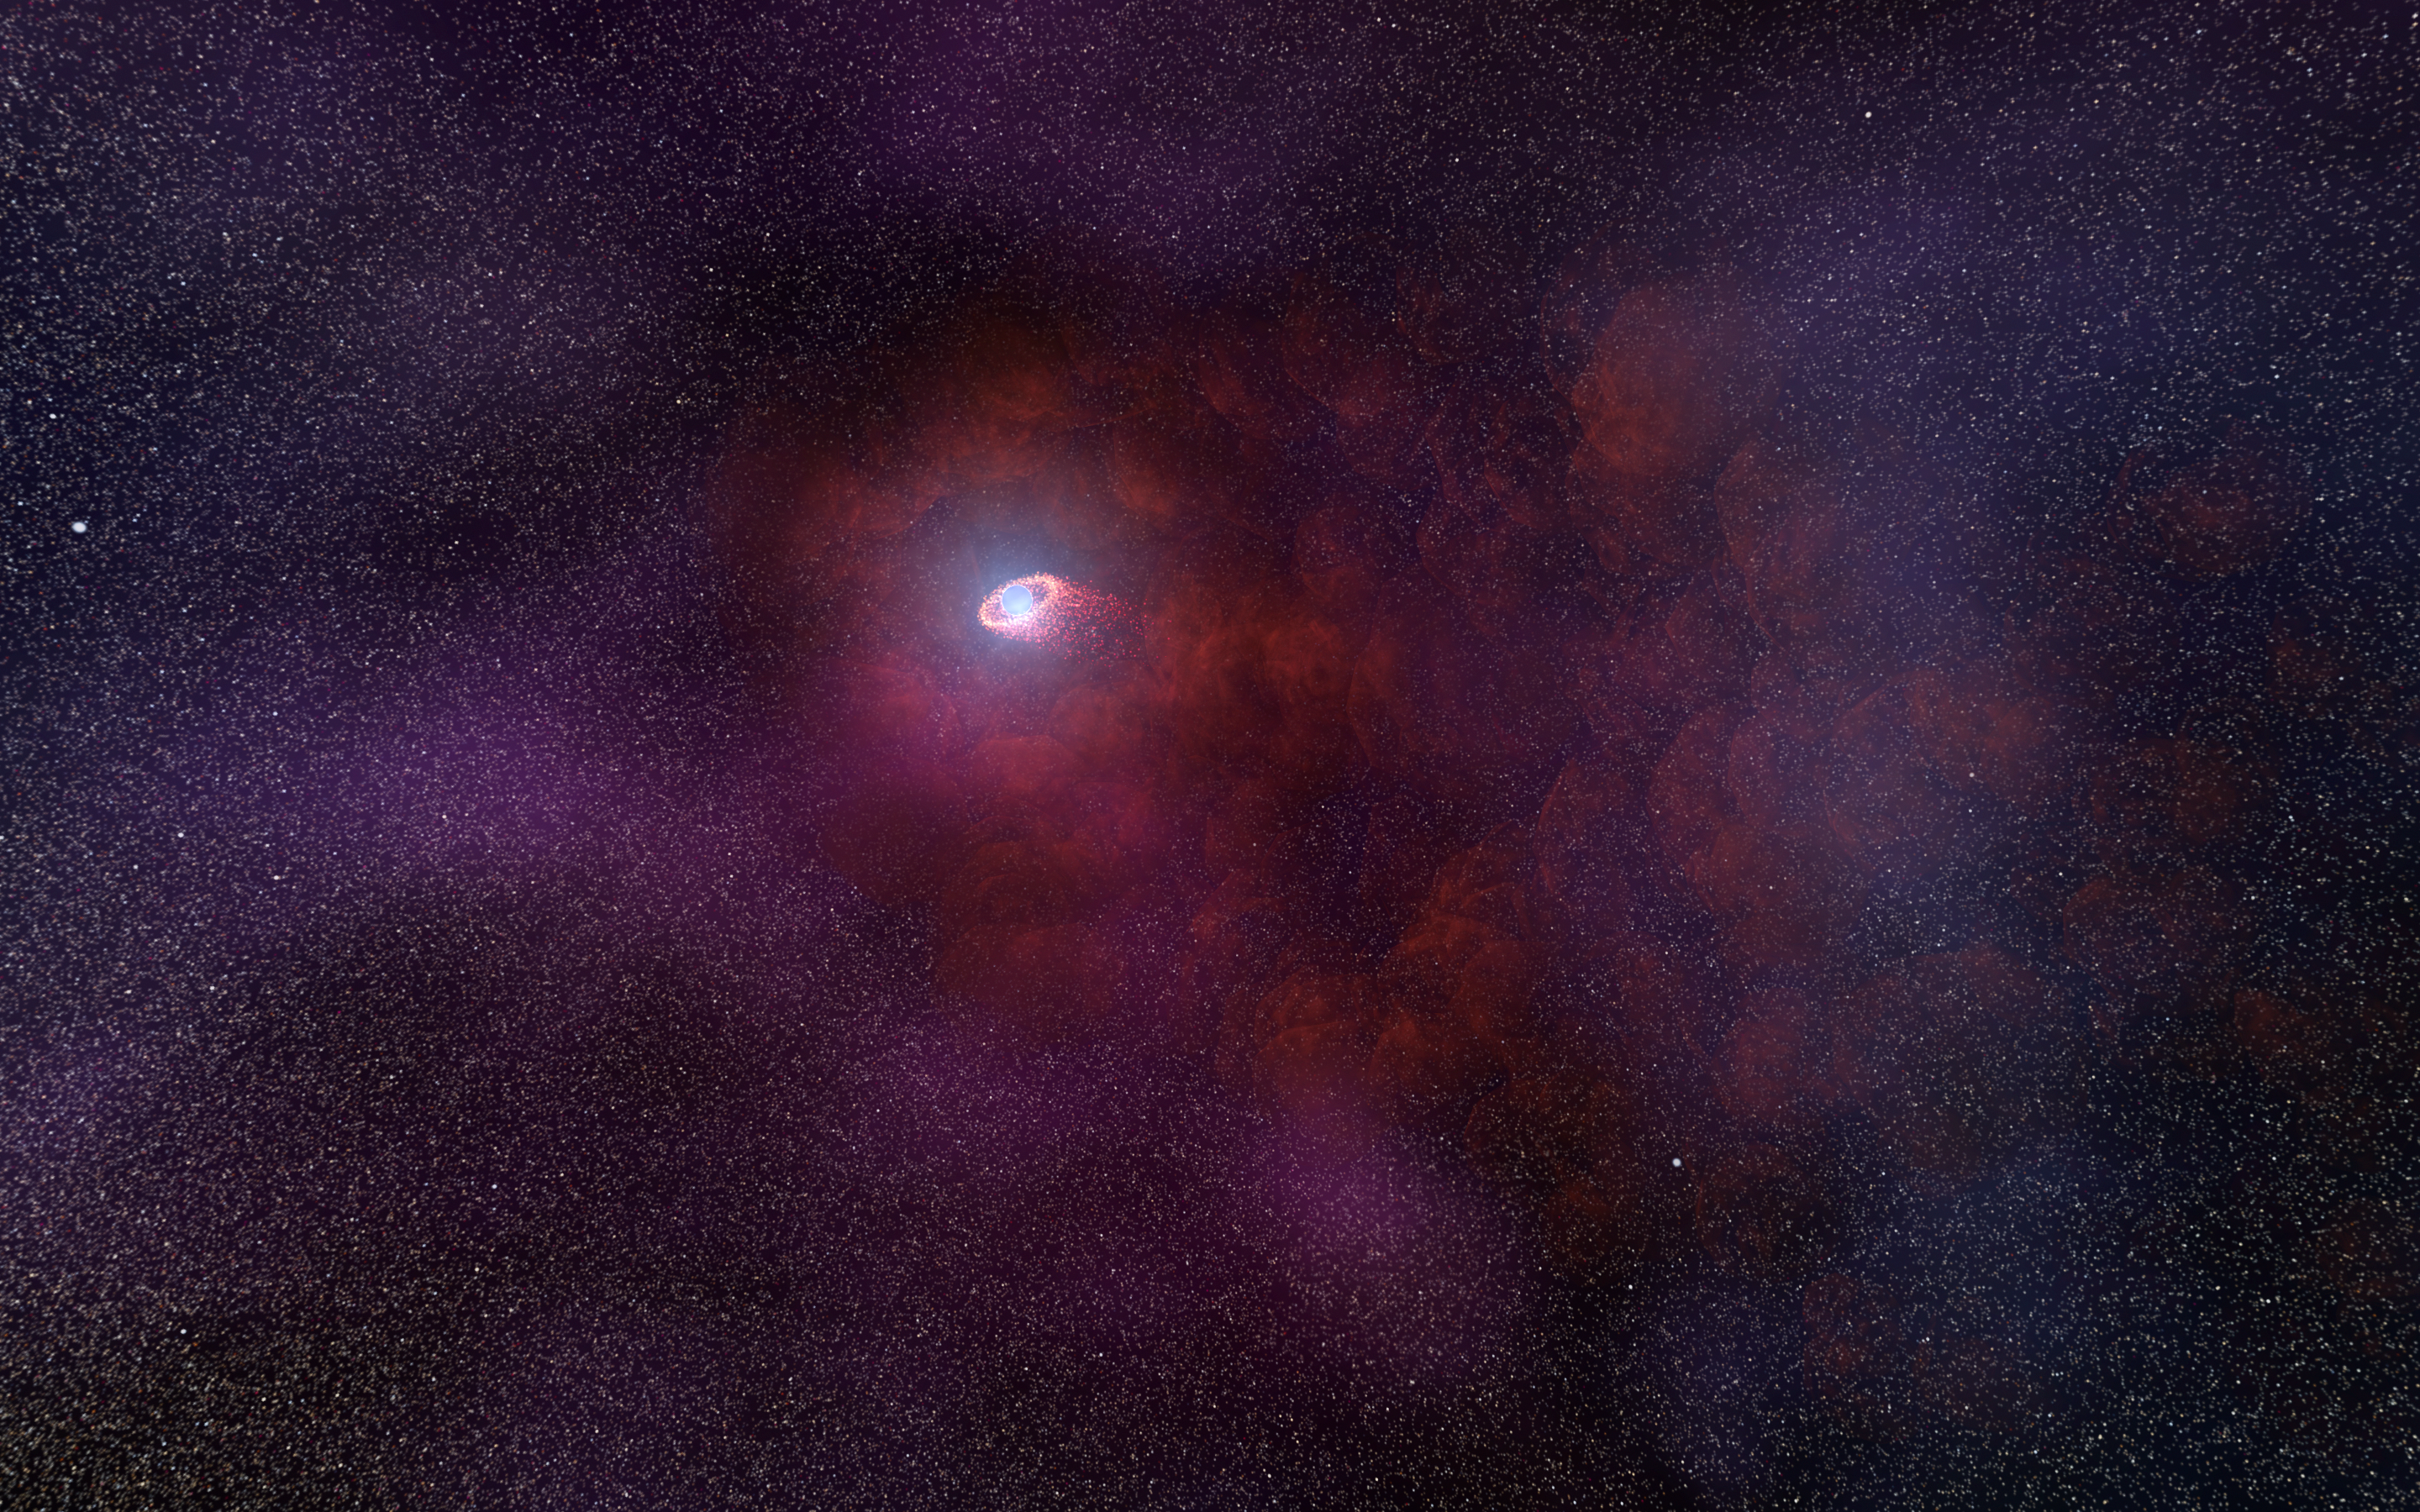

Artist's impression of pulsar wind from a neutron star

This is an illustration of a pulsar wind nebula produced by the interaction of the outflow particles from the neutron star with gaseous material in the interstellar medium that the neutron star is plowing through. Such an infrared-only pulsar wind nebula is unusual because it implies a rather low energy of the particles accelerated by the pulsar’s intense magnetic field. This hypothesised model would explain the unusual infrared signature of the neutron star RX J0806.4-4123 as detected by the NASA/ESA Hubble Space Telescope.

Credit: NASA, ESA, and N. Tr’Ehnl (Pennsylvania State University)